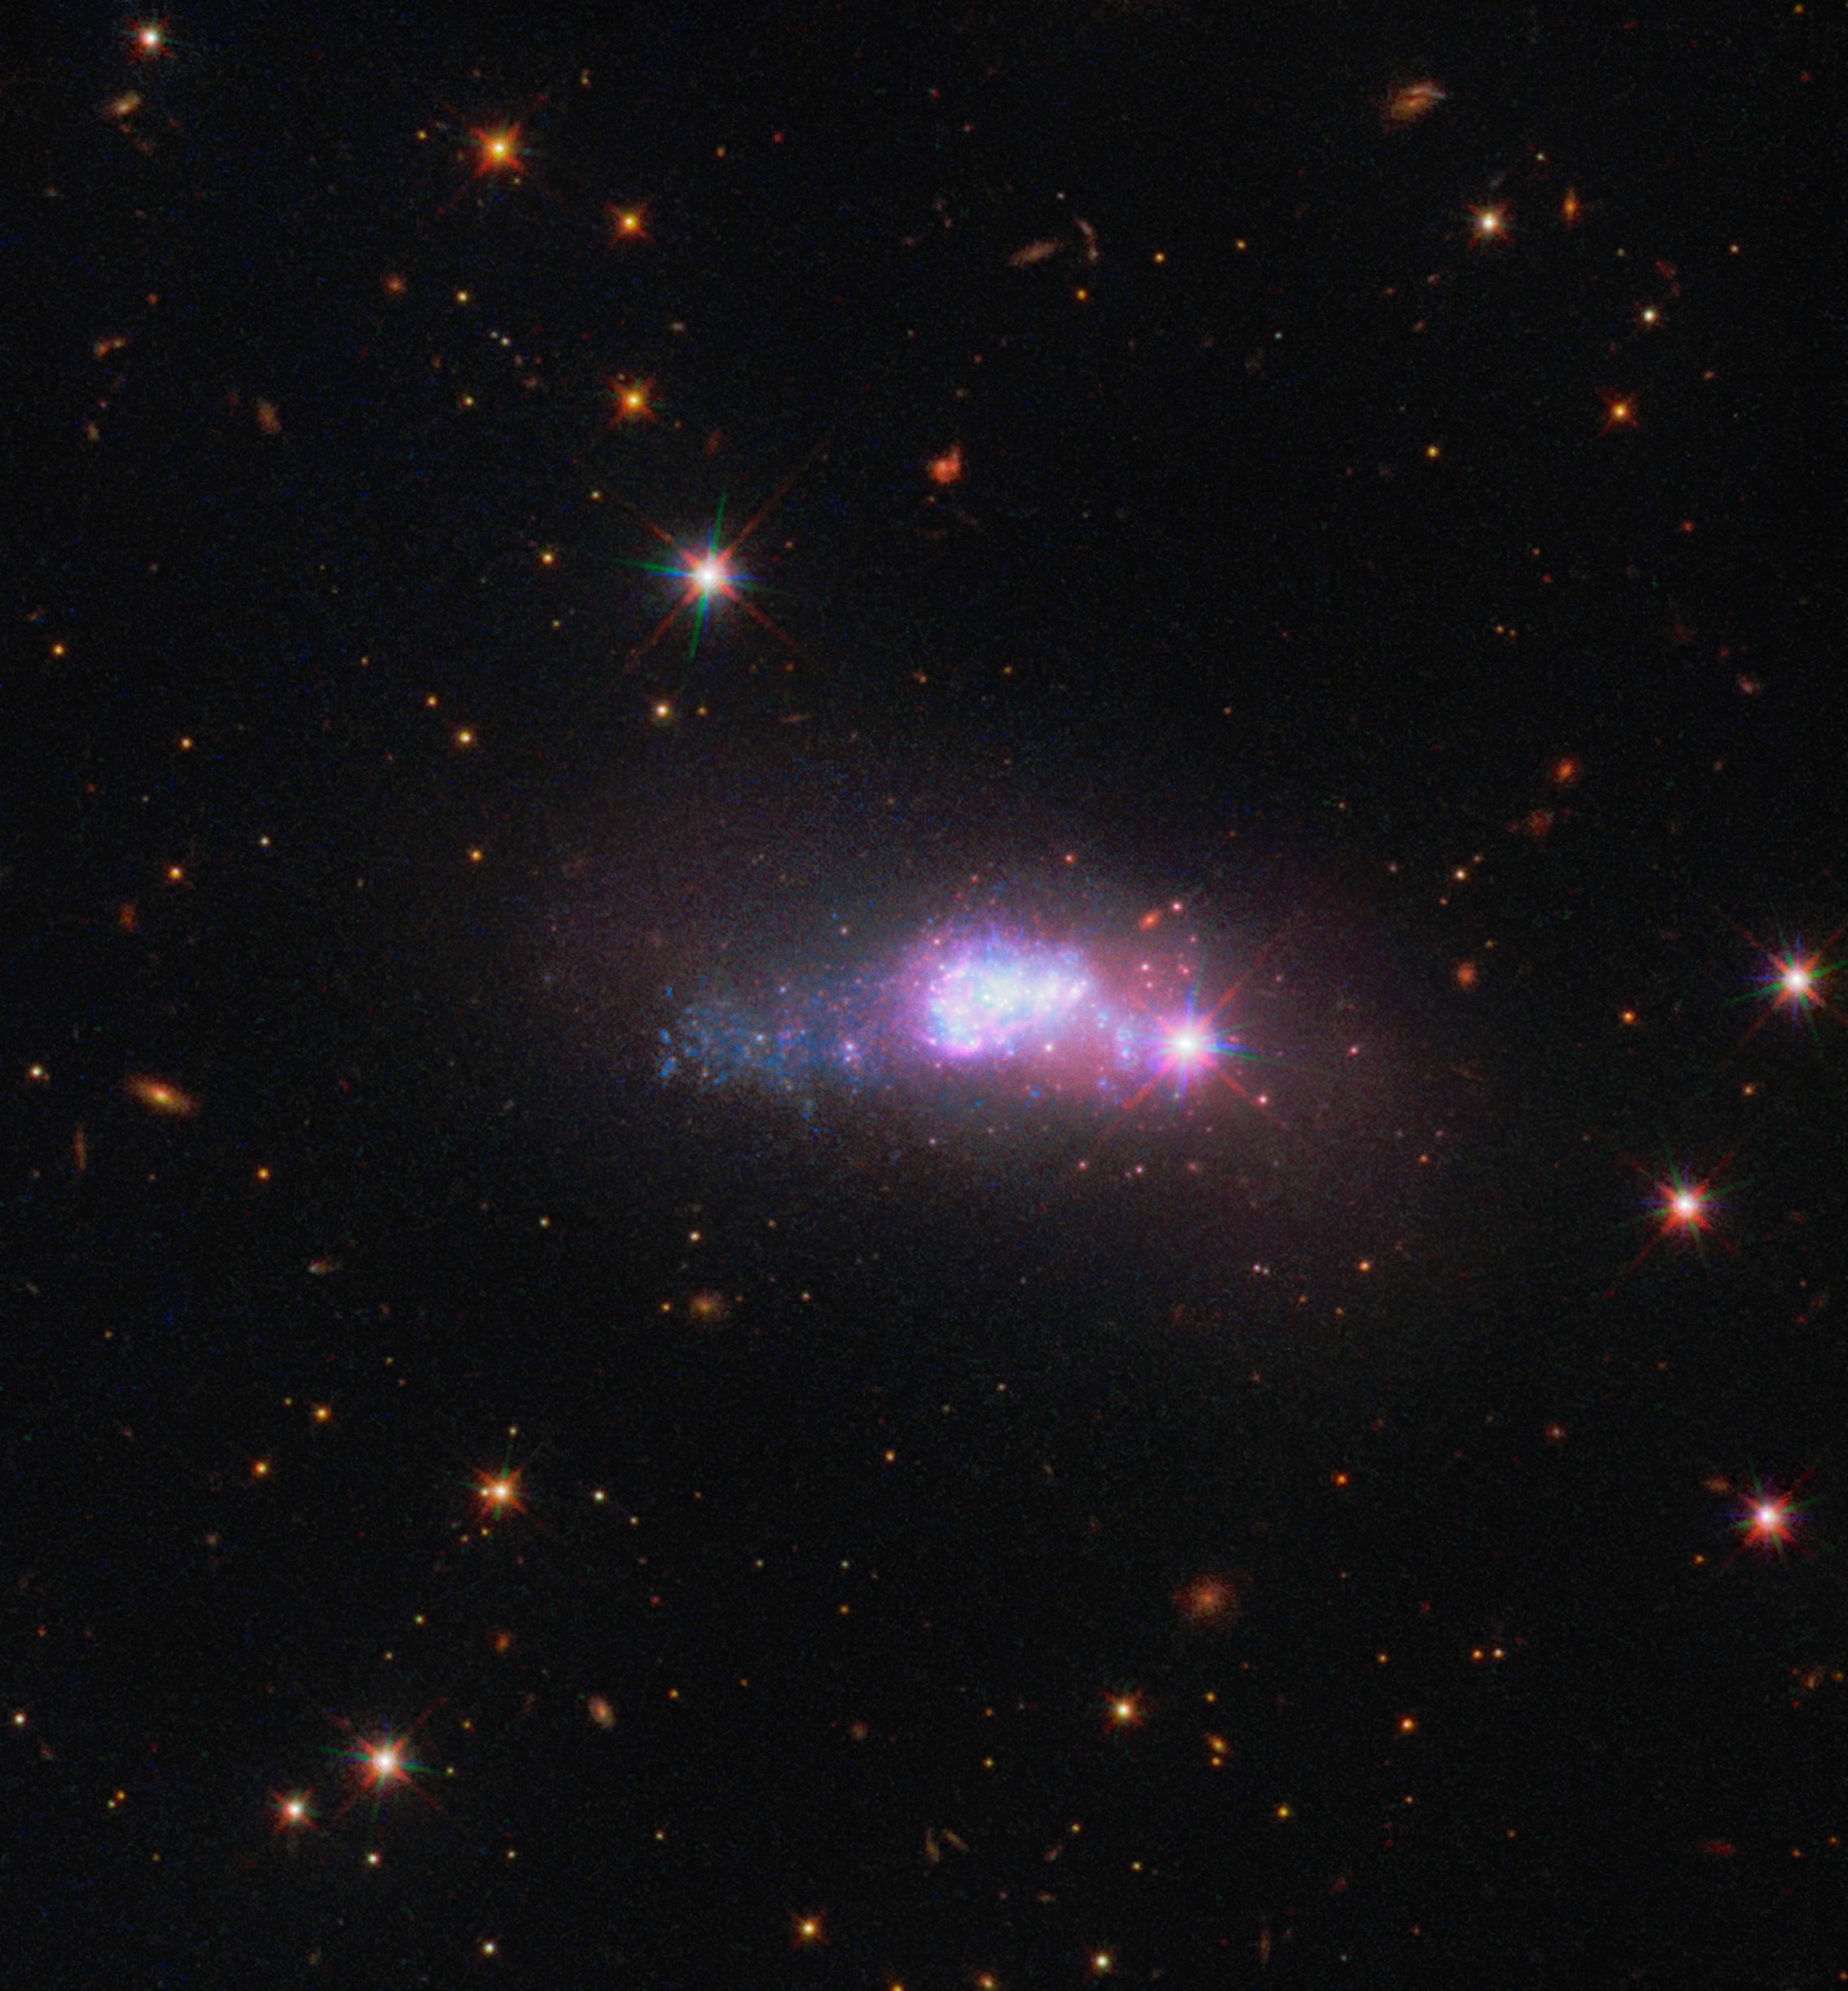

Feeling blue

This captivating image from the NASA/ESA Hubble Space Telescope’s Wide Field Camera 3 shows a lonely dwarf galaxy, a staggering 100 million light-years away from Earth. This image depicts the blue compact dwarf galaxy ESO 338-4, which can be found in the constellation of Corona Australis (the Southern Crown).

Blue compact dwarf galaxies take their name from the intensely blue star-forming regions that are often found within their cores. One such region can be seen embedded in ESO 338-4, which is populated with bright young stars voraciously consuming hydrogen. These massive stars are doomed to a short existence, as despite their vast supplies of hydrogen fuel. The nuclear reactions in the cores of these stars will burn through these supplies in only millions of years — a mere blink of an eye in astronomical terms.

The young blue stars nestled within a cloud of dust and gas in the centre of this image are the result of a recent galaxy merger between a wandering galaxy and ESO 388-4. This galactic interaction disrupted the clouds of gas and dust surrounding ESO 338-4 and led to the rapid formation of a new population of stars.

Credit: ESA/Hubble & NASA